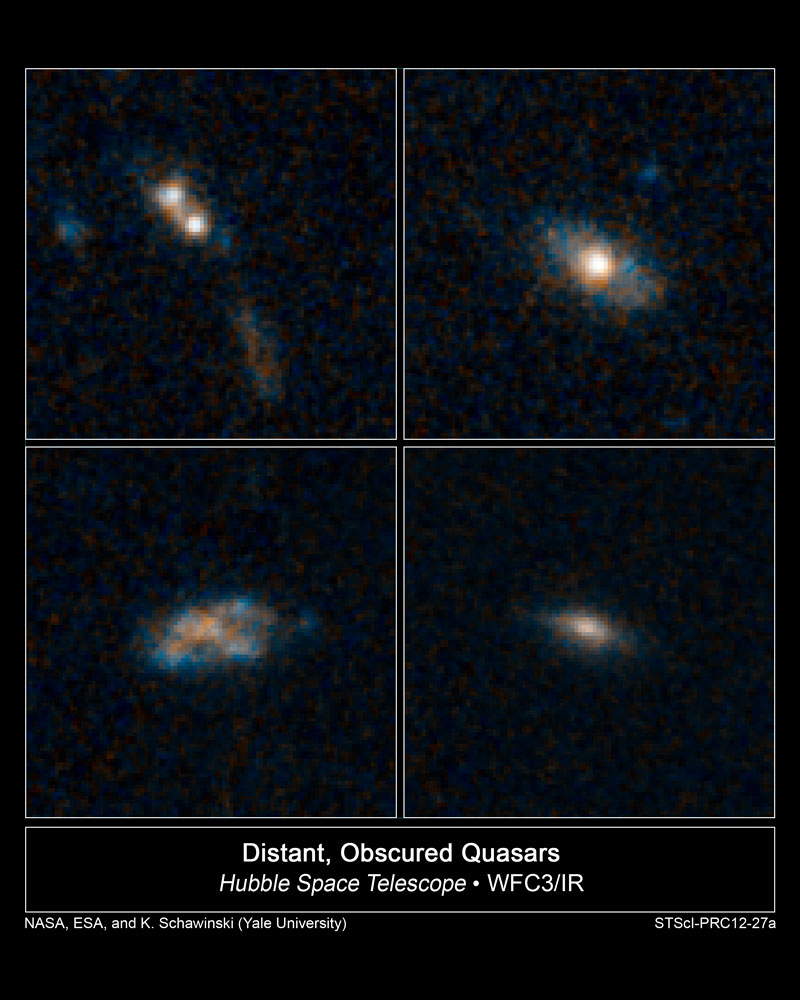

The homes of quasars

The galaxies in these four images have so much dust surrounding them that the brilliant light from their quasars cannot be seen in these Hubble Space Telescope images.

Quasars are the brilliant beacons of light that are powered by black holes feasting on captured material, and in the process, heating some of the matter to millions of degrees.

The galaxies are part of a census of 30 quasar host galaxies conducted with two of NASA's premier observatories, the Hubble Space Telescope and Spitzer Space Telescope. They were found in the Cosmic Assembly Near-infrared Deep Extragalactic Legacy Survey (CANDELS). The study shows that 26 of the host galaxies bear no tell-tale signs of collisions with neighbors, such as distorted shapes.

The quasars found in normal-looking galaxies are fainter than those powered by collisions between galaxies, which send lots of gas and dust into the gravitational whirlpool of hungry black holes. The dimmer quasars are triggered by black holes snacking on such tasty treats as a batch of gas or the occasional small satellite galaxy. They are the most abundant type of quasar, according to the Hubble analysis.

The images at top right, bottom left, and bottom right reveal three of the survey's normal-looking galaxies that host quasars. Only one galaxy in the sample, at top left, shows evidence of an interaction with another galaxy. The two white blobs are the cores from both galaxies. A streamer of material, coloured brown and blue, also lies below the merging galaxies.

The galaxies existed roughly 8 billion to 12 billion years ago, during a peak epoch of black-hole growth. The galaxies' masses are comparable to our Milky Way's. The blue patches are star-forming regions. The brown areas are either dust or old stars.

The images were taken by Hubble's Wide Field Camera 3 between 2011 and 2012.

Credit: NASA, ESA/Hubble, and K. Schawinski (Yale University, USA)